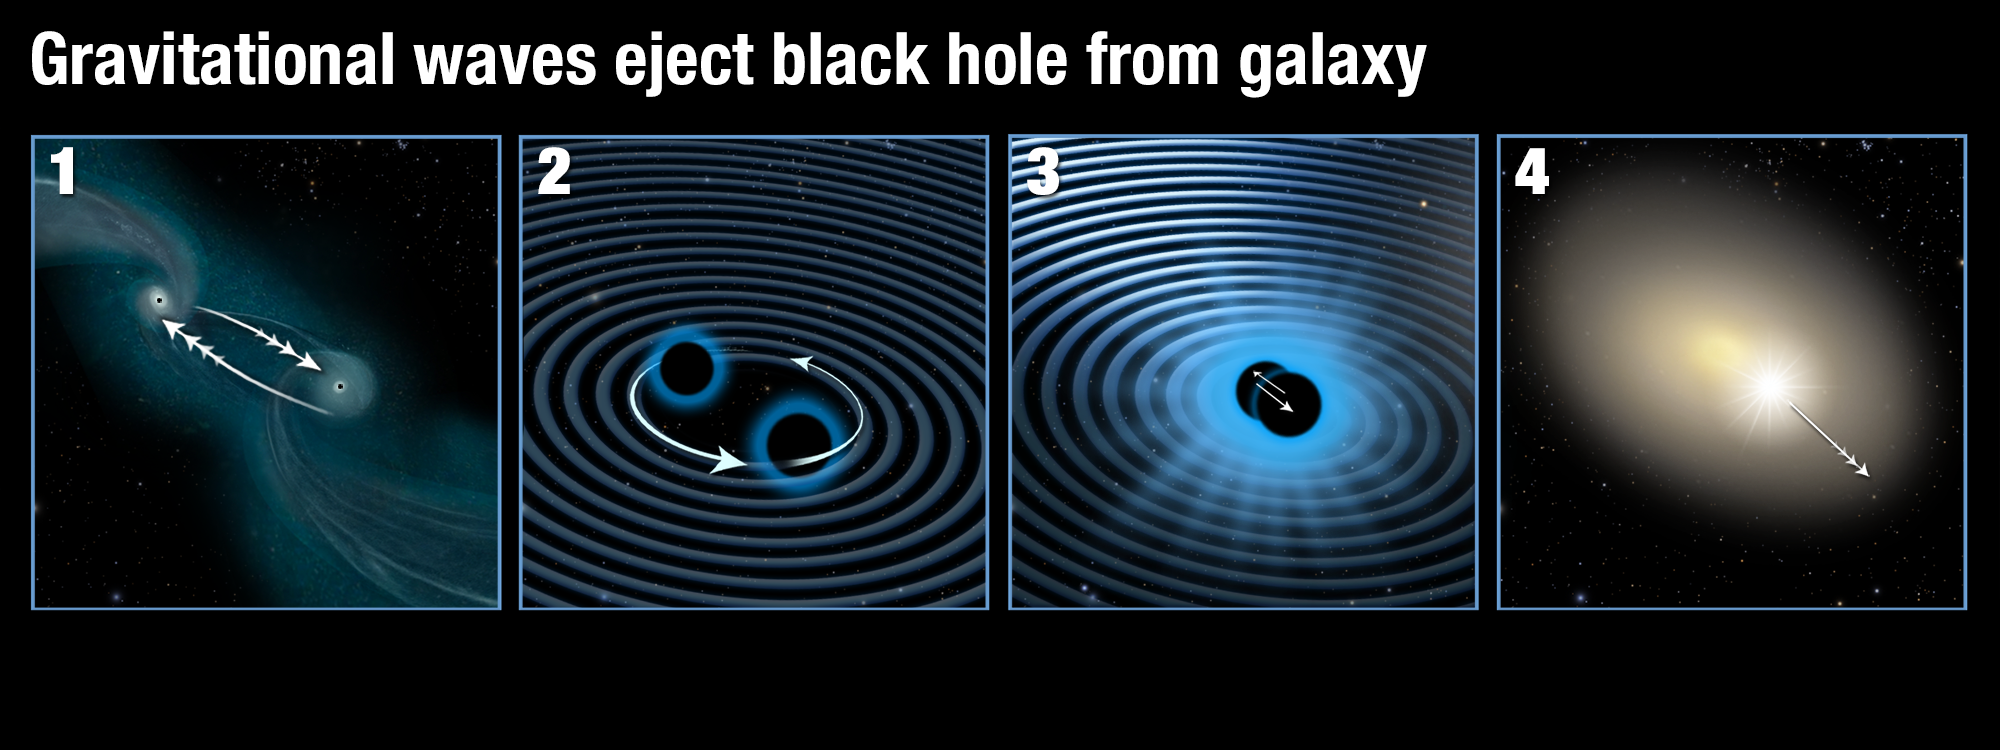

Gravitational waves eject black hole from galaxy

This illustration shows how two supermassive black holes merged to form a single black hole which was then ejected from its parent galaxy.

Panel 1: Two galaxies are interacting and finally merging with each other. The supermassive black holes in their centres are attracted to each other.

Panel 2: As soon as the supermassive black holes get close they start orbiting each other, in the process creating strong gravitational waves.

Panel 3: As they radiate away gravitational energy the black holes move closer to each other over time and finally merge.

Panel 4: If the two black holes do not have the same mass and rotation rate, they emit gravitational waves more strongly along one direction. When the two black holes finally collide, they stop producing gravitational waves and the newly merged black hole then recoils in the opposite direction to the strongest gravitational waves and is shot out of its parent galaxy.

Credit: NASA, ESA/Hubble, and A. Feild/STScI